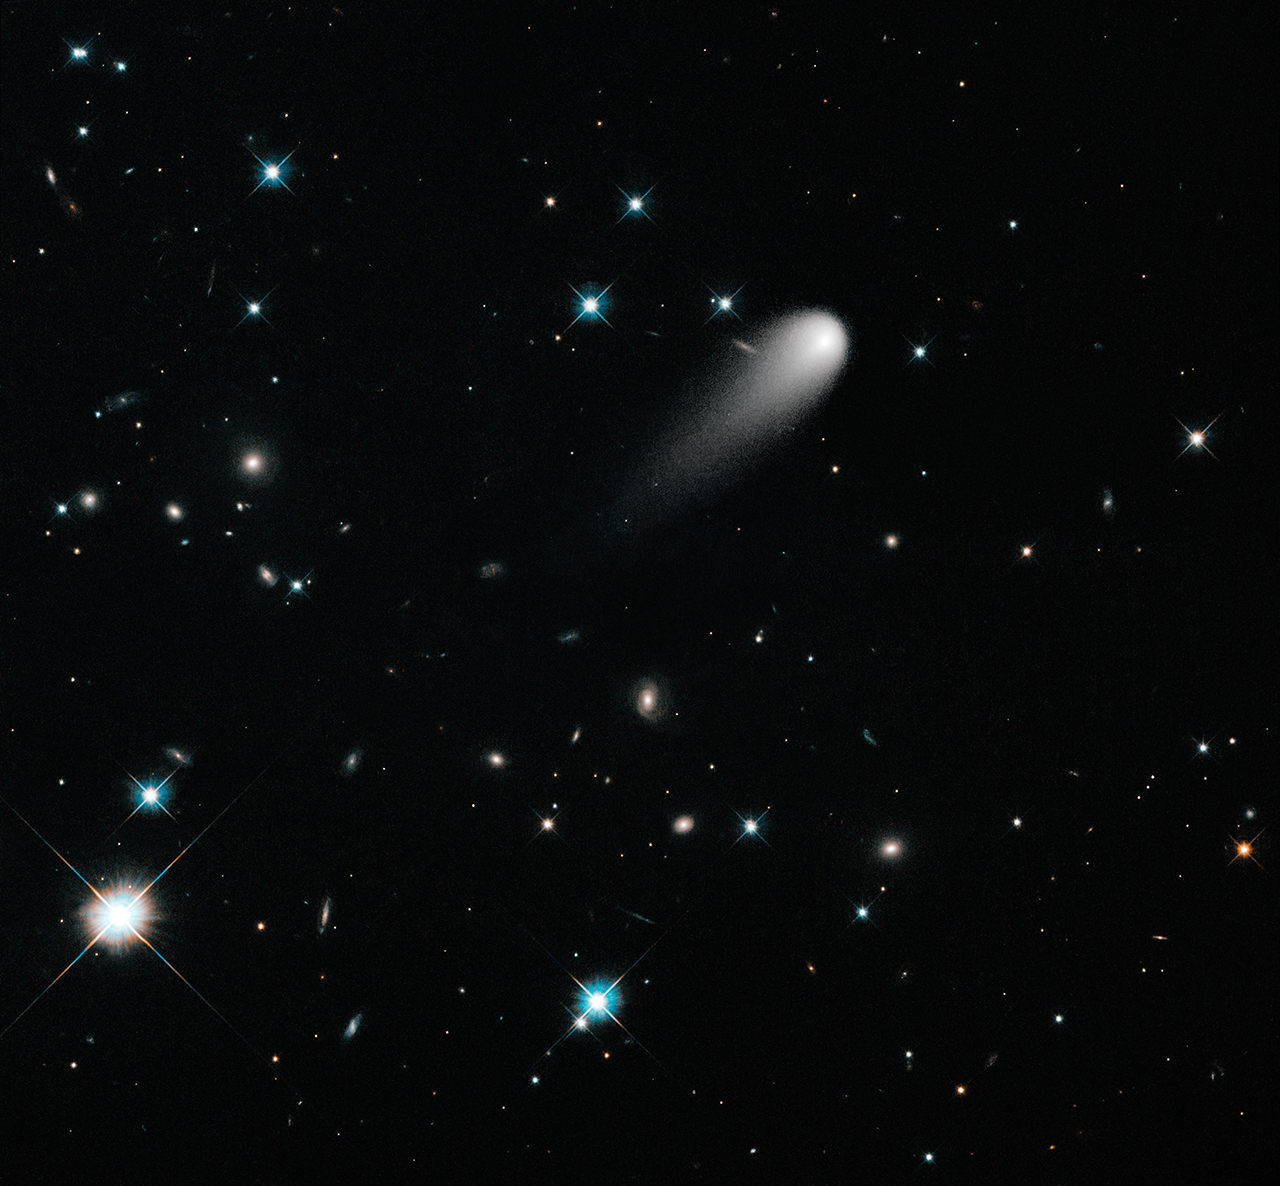

A unique Hubble view of comet ISON

In this Hubble Space Telescope composite image taken in April 2013, the sun-approaching Comet ISON floats against a seemingly infinite backdrop of numerous galaxies and a handful of foreground stars. The icy visitor, with its long gossamer tail, appears to be swimming like a tadpole through a deep pond of celestial wonders.

In this composite image, background stars and galaxies were separately photographed in red and yellow-green light. Because the comet moved between exposures relative to the background objects, its appearance was blurred. The blurred comet photo was replaced with a single, black-and-white exposure.

The images were taken with the Wide Field Camera 3 on April 30, 2013.

This photo is one of the original images featured on ISONblog, a new online source offering analysis of Comet ISON by Hubble Space Telescope astronomers and staff at the Space Telescope Science Institute in Baltimore, USA.

Credit: NASA, ESA, and the Hubble Heritage Team (STScI/AURA)